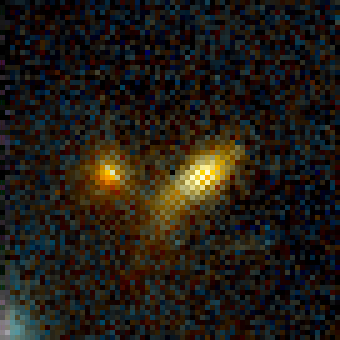

Galaxy Cluster MS1054-03

Exciting Hubble Space Telescope images of more than a dozen very distant colliding galaxies indicate that, at least in some cases, big massive galaxies form through collisions between smaller ones, in a 'generation after generation' never-ending story.

Credit: ESA/NASA, Pieter van Dokkum (University of Groningen/Leiden), Marijn Franx (University of Groningen/Leiden)